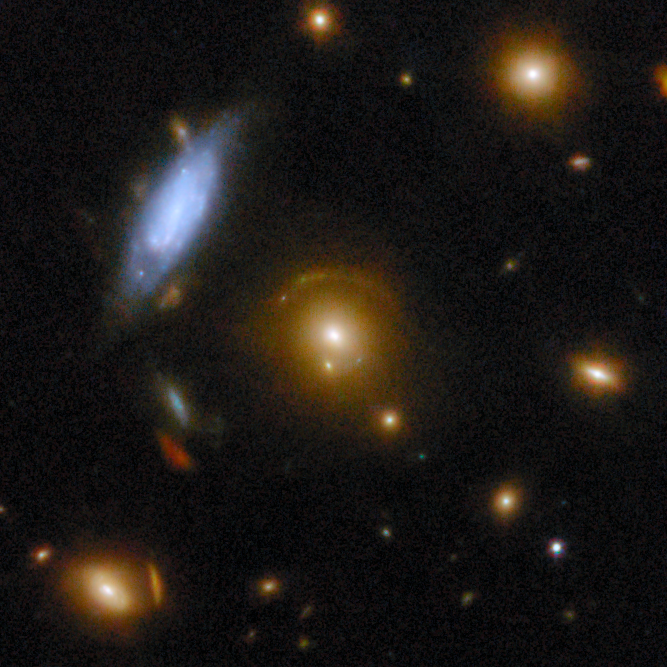

Gravitational lens COSJ095914+021219

The golden galaxy at the centre of the image is an elliptical galaxy whose immense gravity is bending the light from a more distant galaxy. The background galaxy is faintly visible as a golden arc along the top of the foreground galaxy.

This gravitational lens is one of eight featured in the September 2025 Picture of the Month.

Credit: ESA/Webb, NASA & CSA, G. Gozaliasl, A. Koekemoer, M. Franco